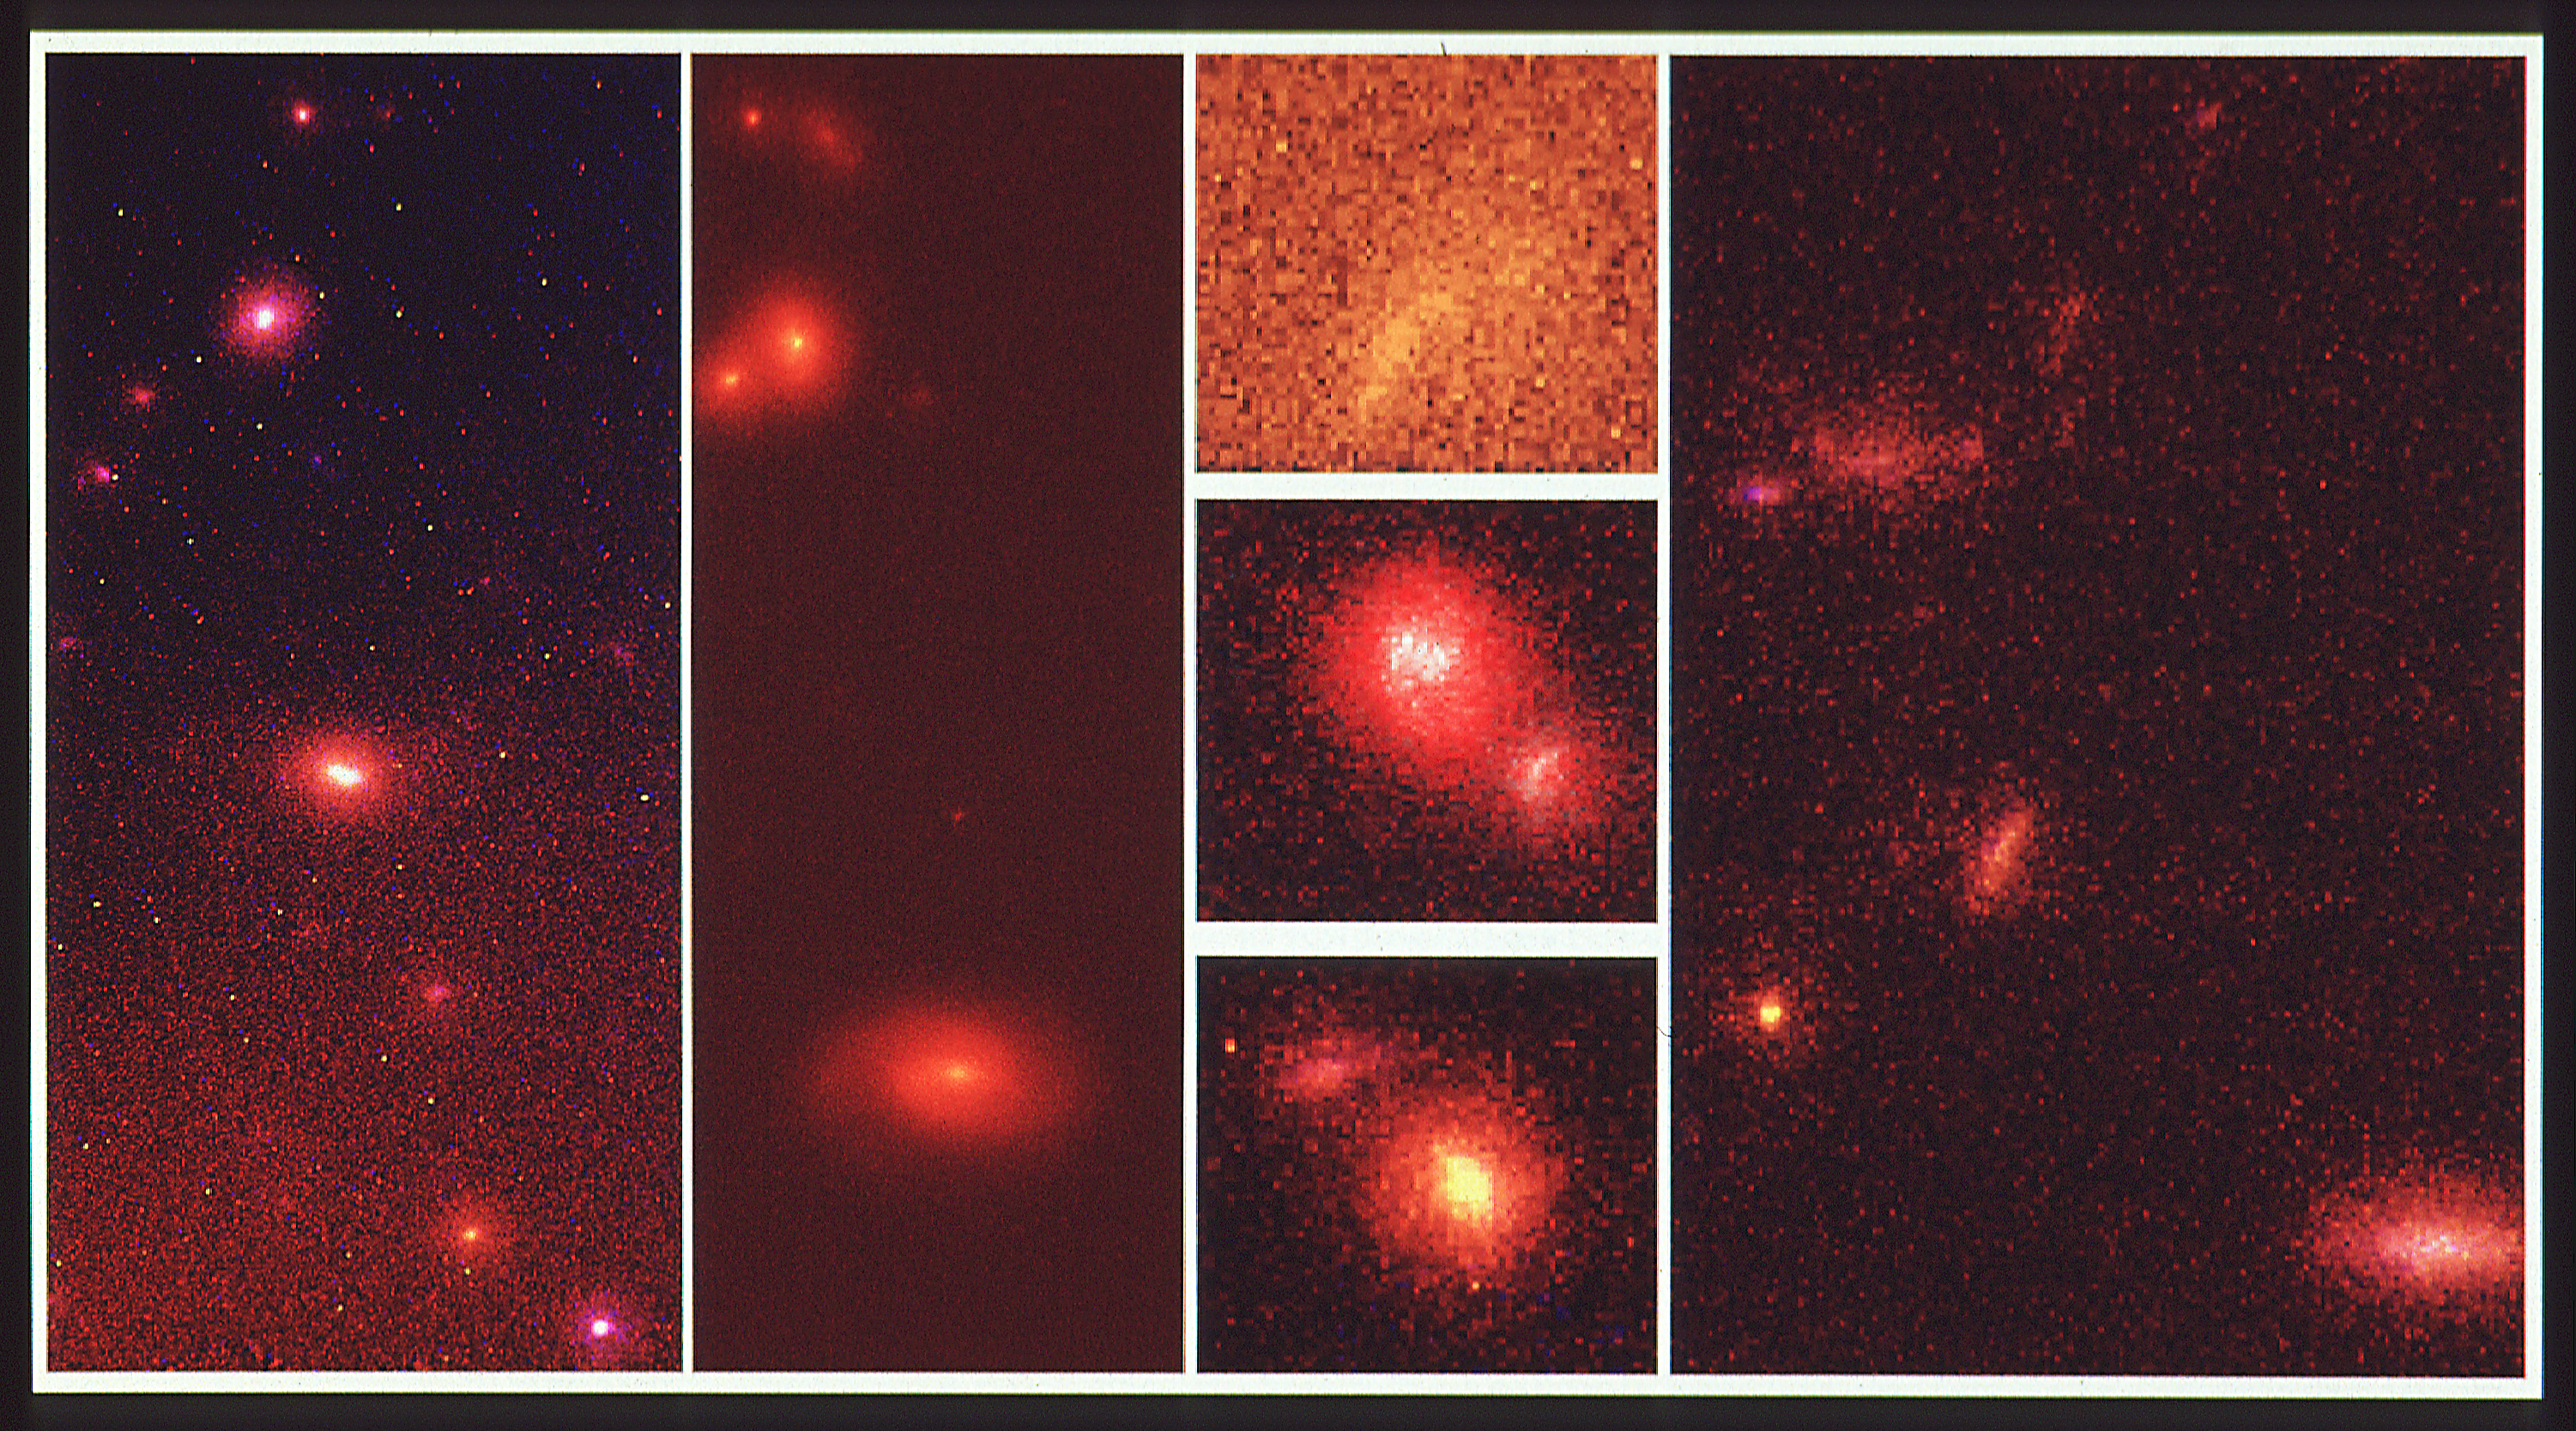

Hubble Space Telescope deep-sky survey reveals embryonic galaxies

This is a selection of images of unusual galaxies discovered during a serendipitous sky survey with the Wide Field Camera onboard NASA/ESA Hubble Space Telescope (Ht1). This is a colour composite of two images taken at different wavelengths: visible light (yellow) and near infrared (red).

The individual galaxies are estimated to be between three and ten billion light-years away. HST's high resolution reveals that they have unusual irregular shapes which are not like the familiar spiral and elliptical galaxies in the nearby universe. One idea is that the fragmentary galaxies are interacting, as evident in some of the images which show apparent mergers. The objects resolved by HST may be the "building blocks" for today's large galaxies.

Credit: R. Griffiths (STSCI/ JHU), and NASA/ESA